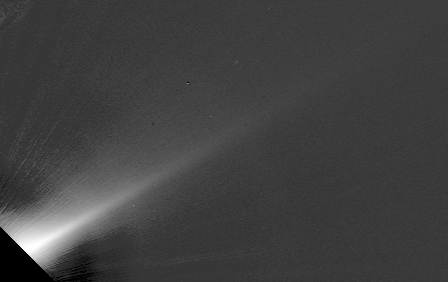

Beta Pictoris Edge-On

This Hubble Space Telescope image of a portion of a vast dust disk around the star Beta Pictoris shows that the disk is thinner than thought previously.

Estimates based on the Hubble image place the disk's thickness as no more than one billion miles (600 million kilometers), or about 1/4 previous estimates from ground-based observations.

Credit: Al Schultz (CSC/STScI) and NASA/ESA